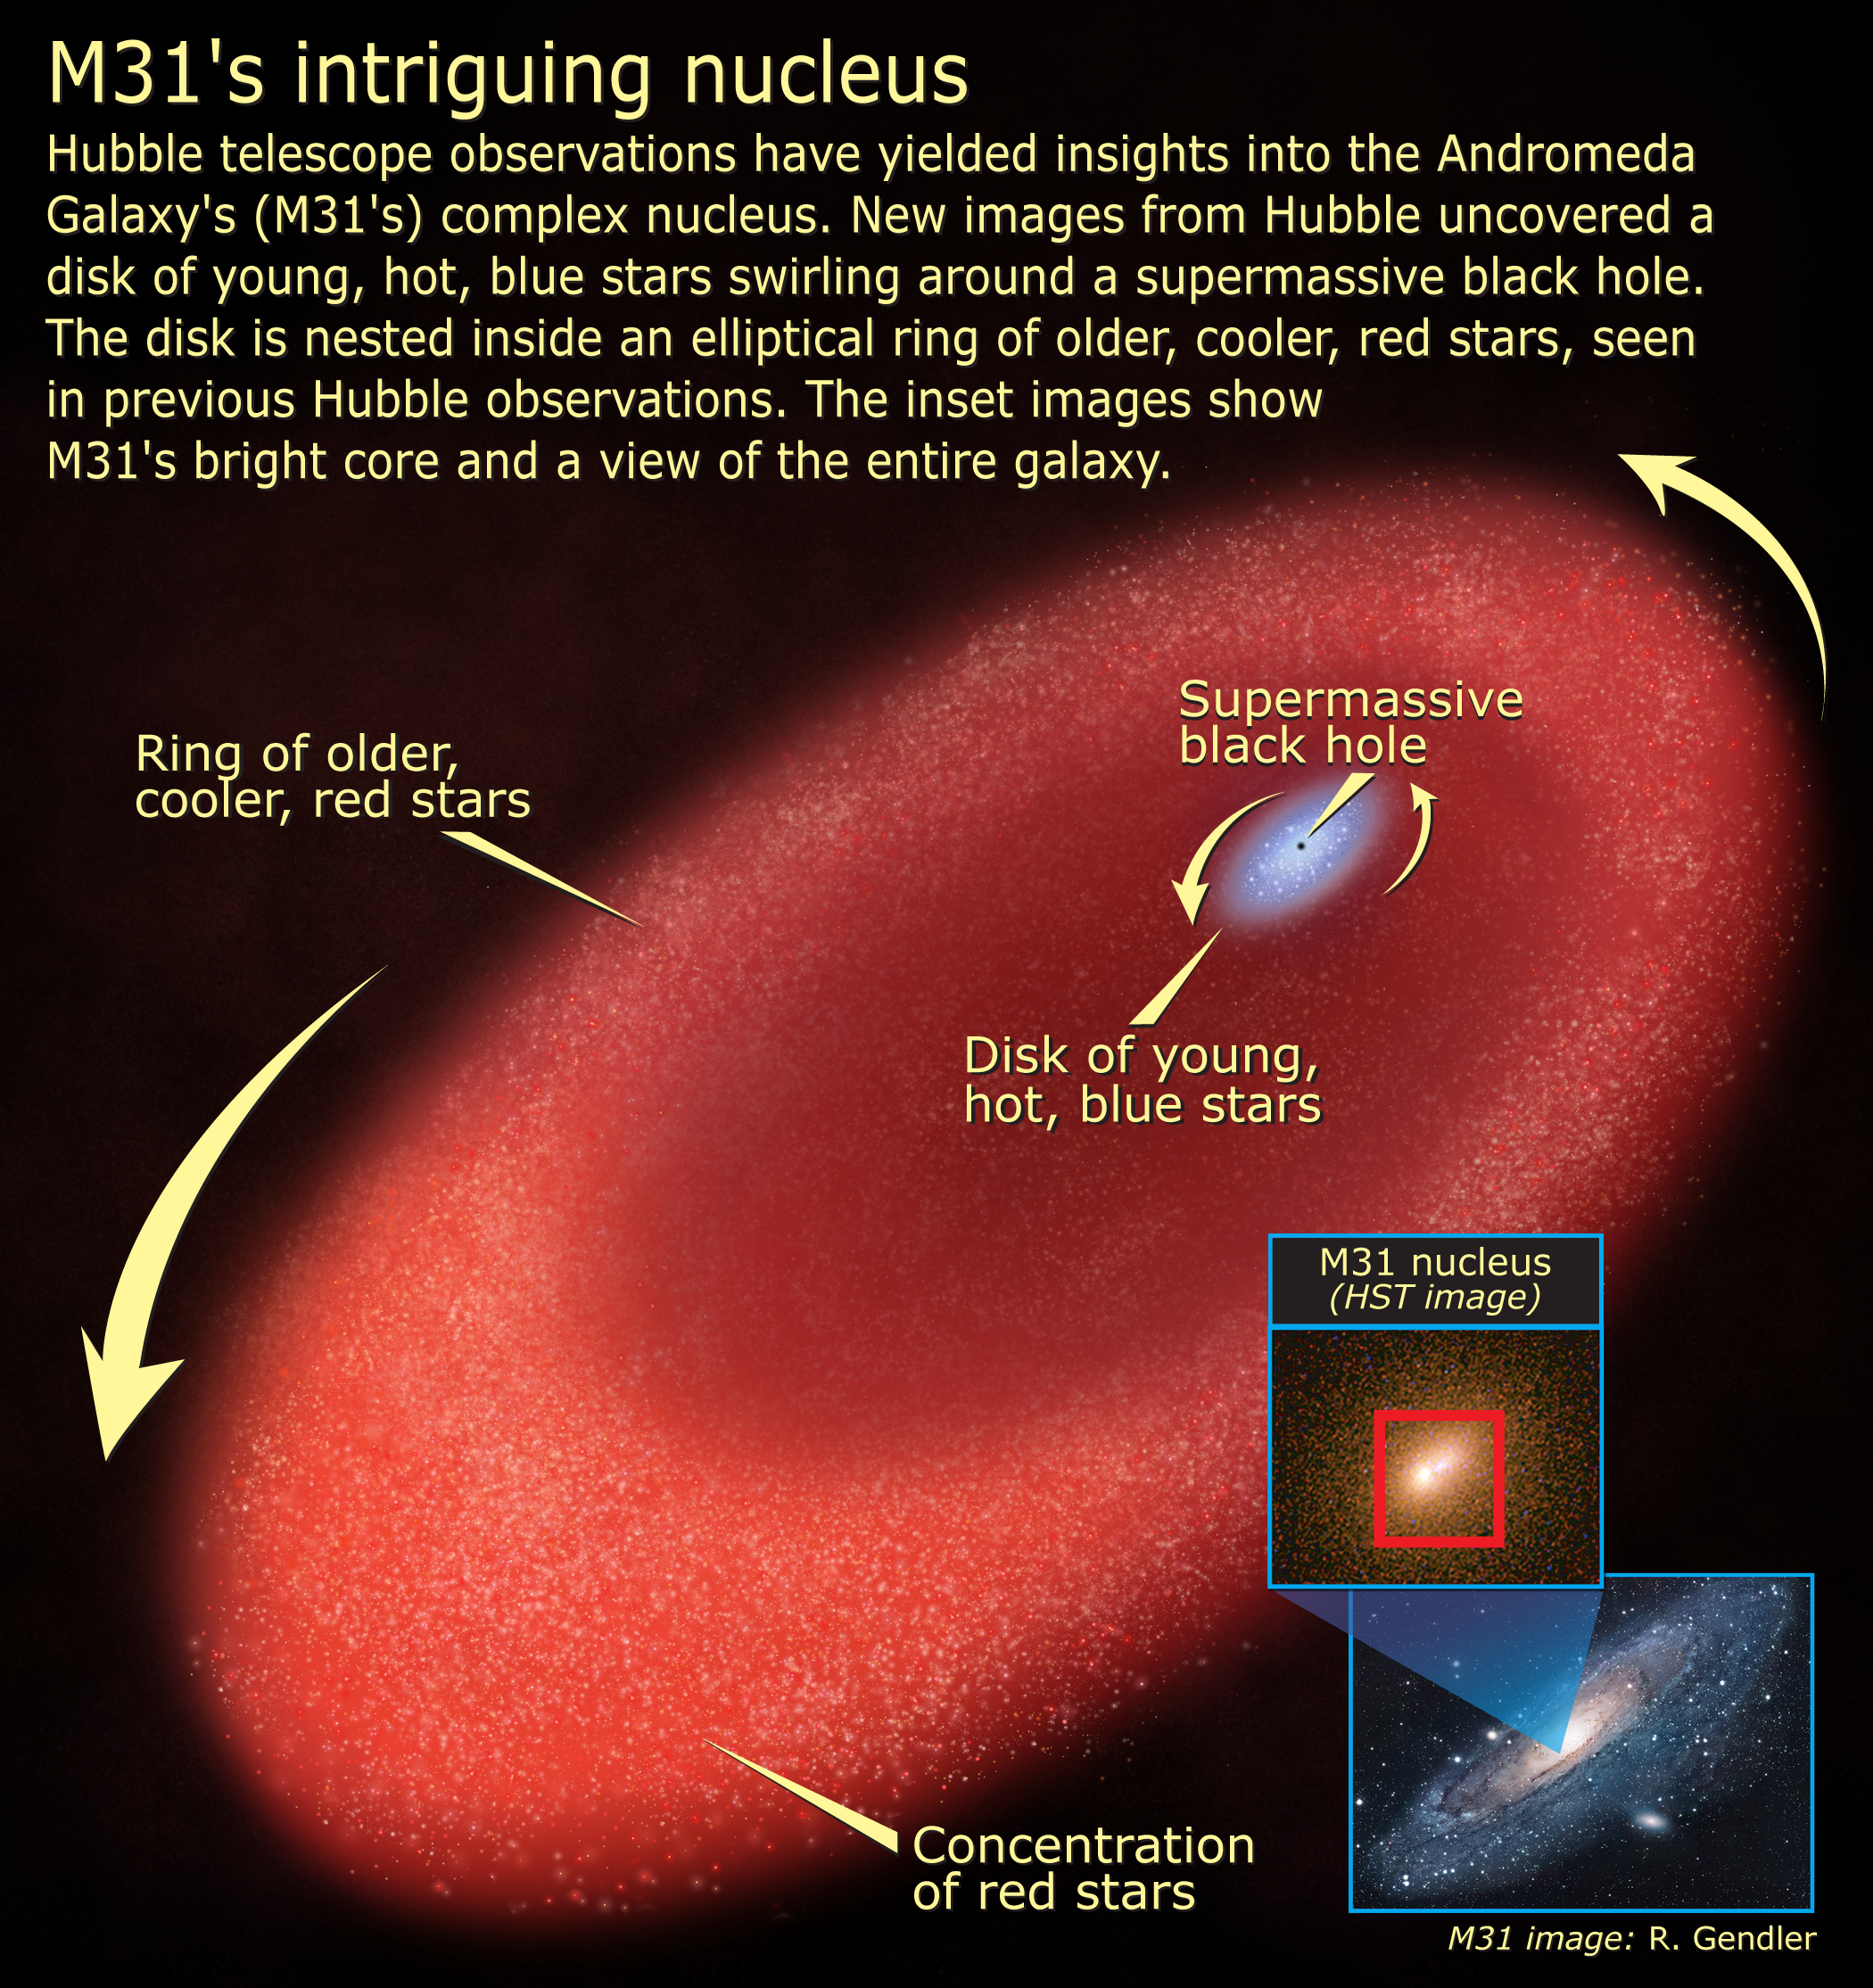

M31's intriguing nucleus

Hubble telescope observations have yielded insights into the Andromeda Galaxy's (M31's) complex nucleus. New images from Hubble uncovered a disk of young, hot, blue stars swirling around a supermassive black hole. The disk is nested inside an elliptical ring of older, cooler, red stars, seen in previous Hubble observations. The inset images show M31's bright core and a view of the entire galaxy.

Credit: NASA, ESA, and A. Feild (STScI)